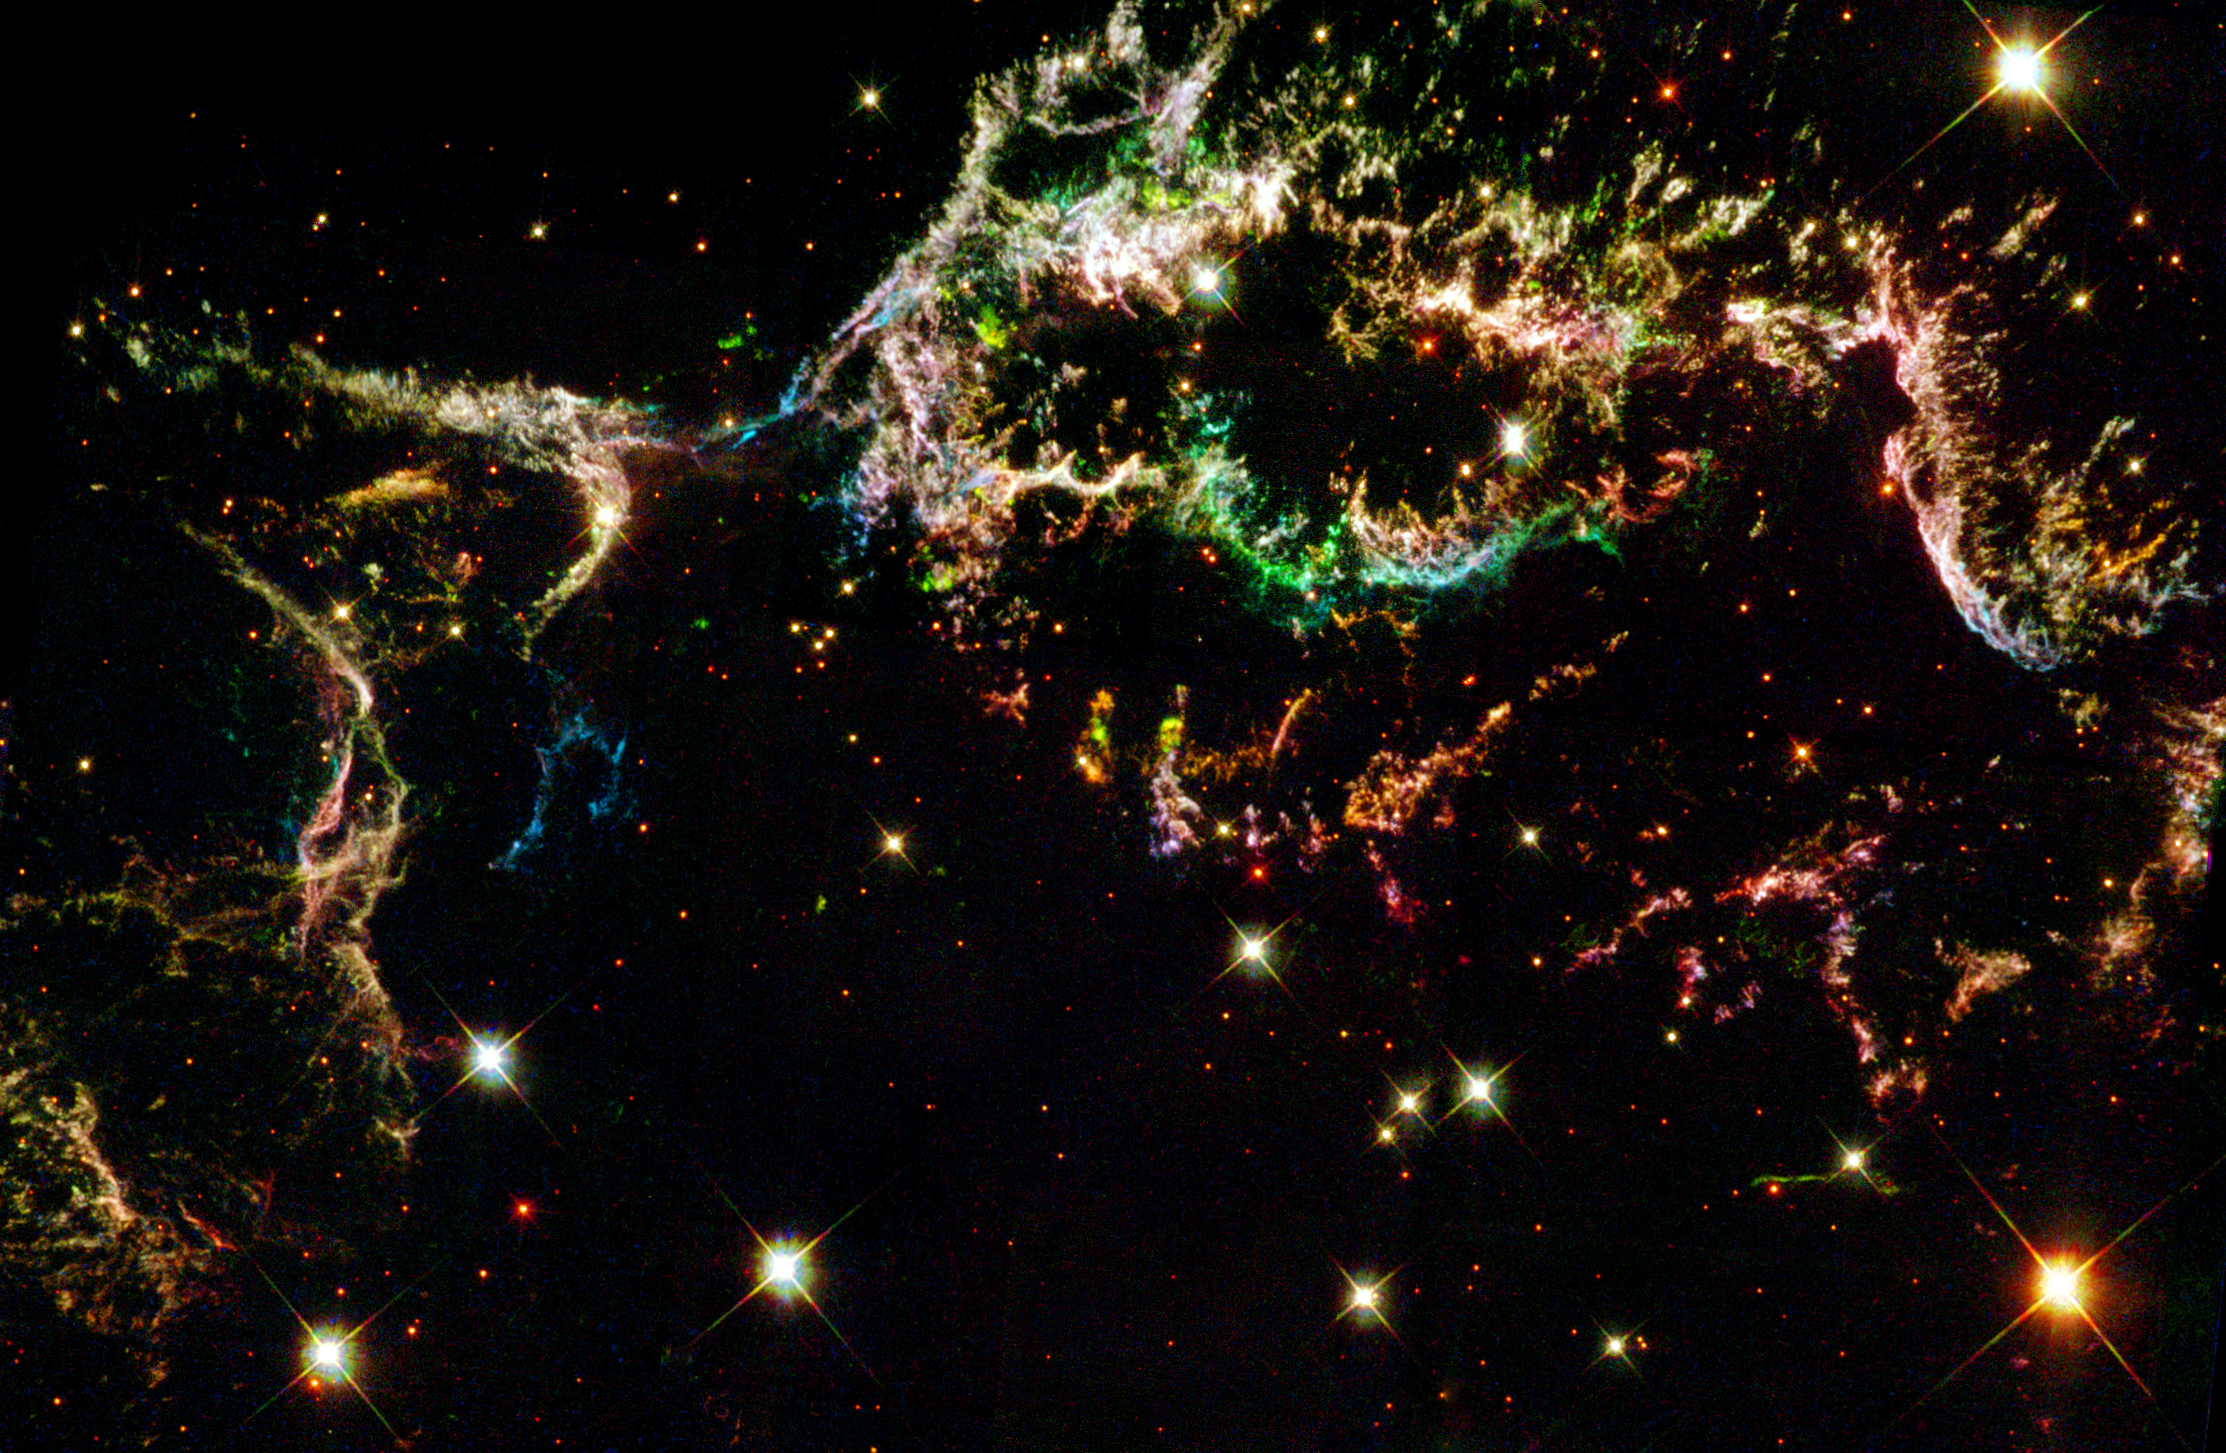

Fireworks in the Sky

Glowing gaseous streamers of red, white, and blue - as well as green and pink - illuminate the heavens like Fourth of July fireworks. The colorful streamers that float across the sky in this photo taken by the NASA/ESA Hubble Space Telescope were created by the universe's biggest firecracker, the titanic supernova explosion of a massive star.

The light from the exploding star reached Earth 320 years ago. The dead star's shredded remains are called Cassiopeia A, or 'Cas A' for short. Cas A is the youngest known supernova remnant in our Milky Way Galaxy and resides 10, 000 light-years away in the constellation Cassiopeia, so the star actually blew up 10, 000 years before the light reached Earth in the late 1600s.

Credit: NASA/ESA and The Hubble Heritage Team (STScI/AURA)